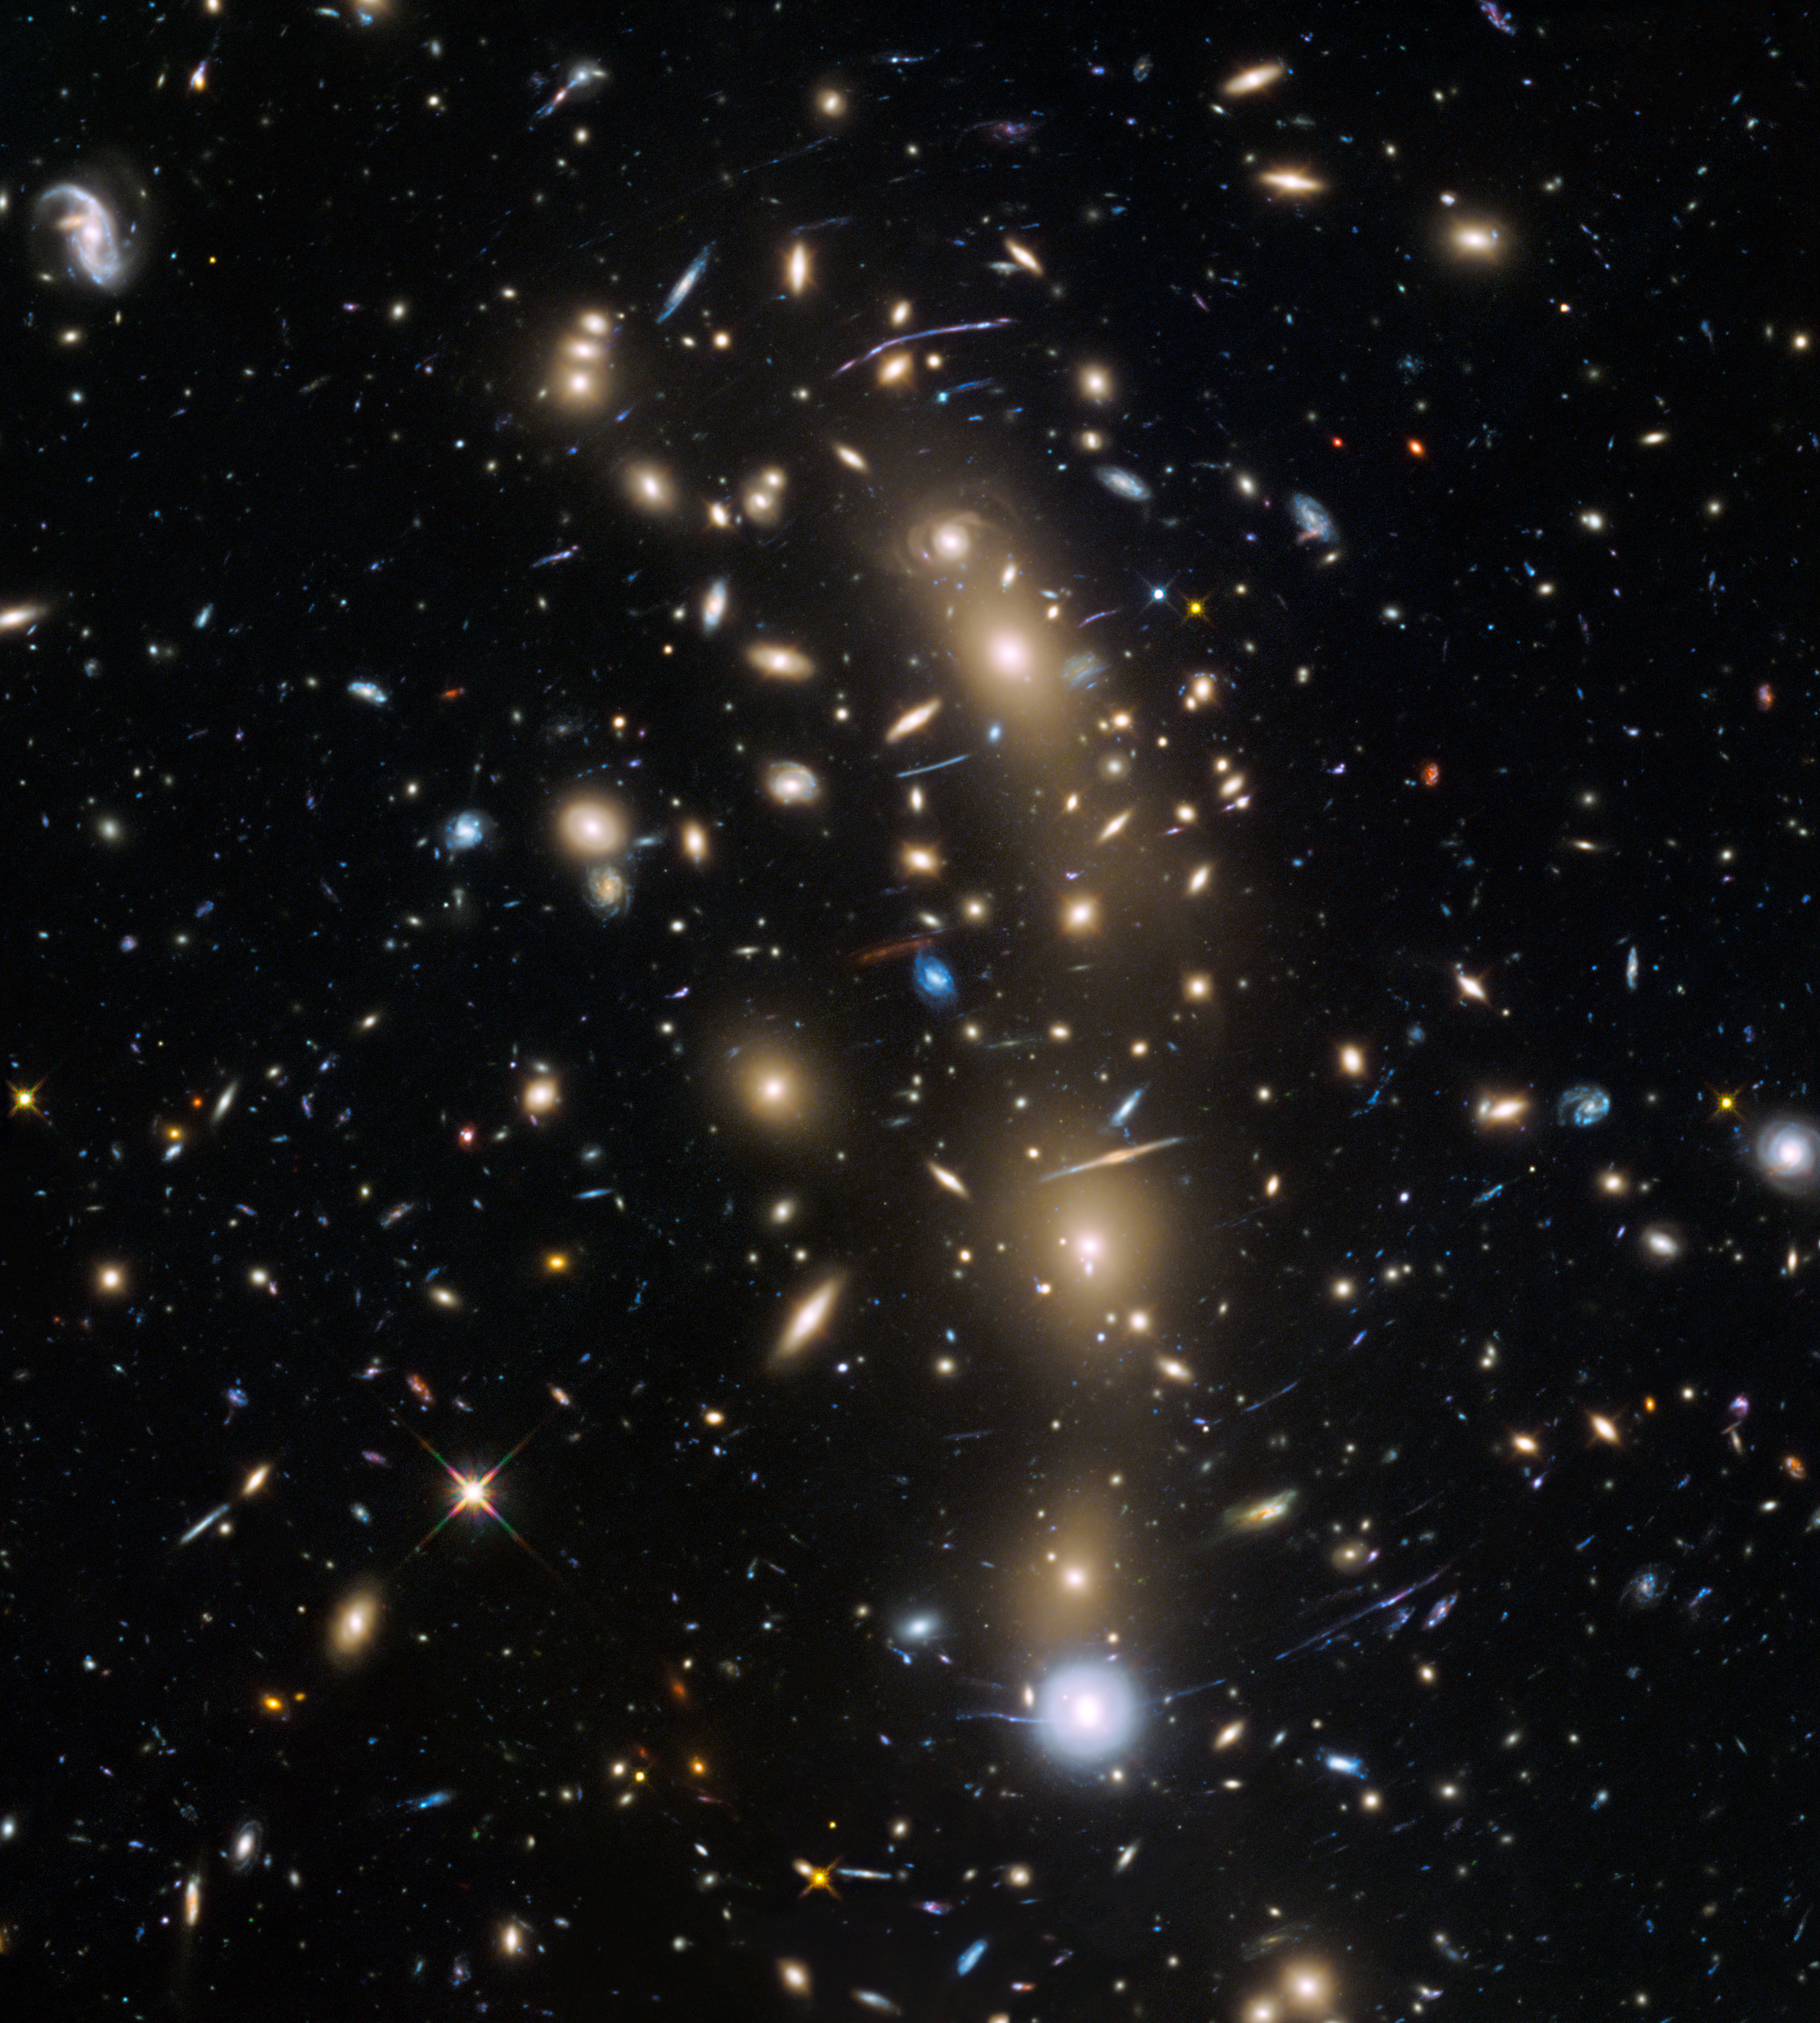

Hubble Frontier Fields view of MACSJ0416.1–2403

This image from the NASA/ESA Hubble Space Telescope shows the galaxy cluster MACS J0416.1–2403. This is one of six being studied by the Hubble Frontier Fields programme, which together have produced the deepest images of gravitational lensing ever made.

Due to the huge mass of the cluster it is bending the light of background objects, acting as a magnifying lens. Astronomers used this and two other clusters to find galaxies which existed only 600 to 900 million years after the Big Bang.

Credit: NASA, ESA and the HST Frontier Fields team (STScI)